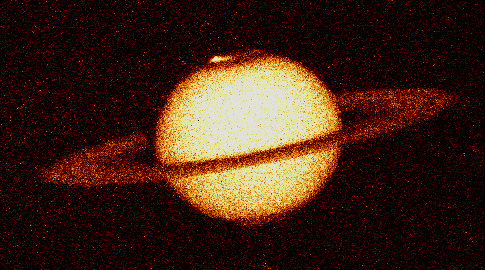

The Aurorae on Saturn

This is the first image ever taken of bright aurorae at Saturn's northern and southern poles, as seen in far ultraviolet light by the Wide Field and Planetary Camera 2aboard the Hubble Space Telescope.

The aurora is produced as trapped charged particles precipitating from the magnetosphere collide with atmospheric gases -- molecular and atomic hydrogen in Saturn's case. As a result of the bombardment, Saturn's gases glow at far-ultraviolet wavelengths (110-160 nanometers) which are absorbed by the Earth's atmosphere, and so can only be observed from space-based telescopes.

Credit: J.T. Trauger (JPL), J.T. Clarke (Univ. of Michigan), the WFPC2science team, and NASA/ESA